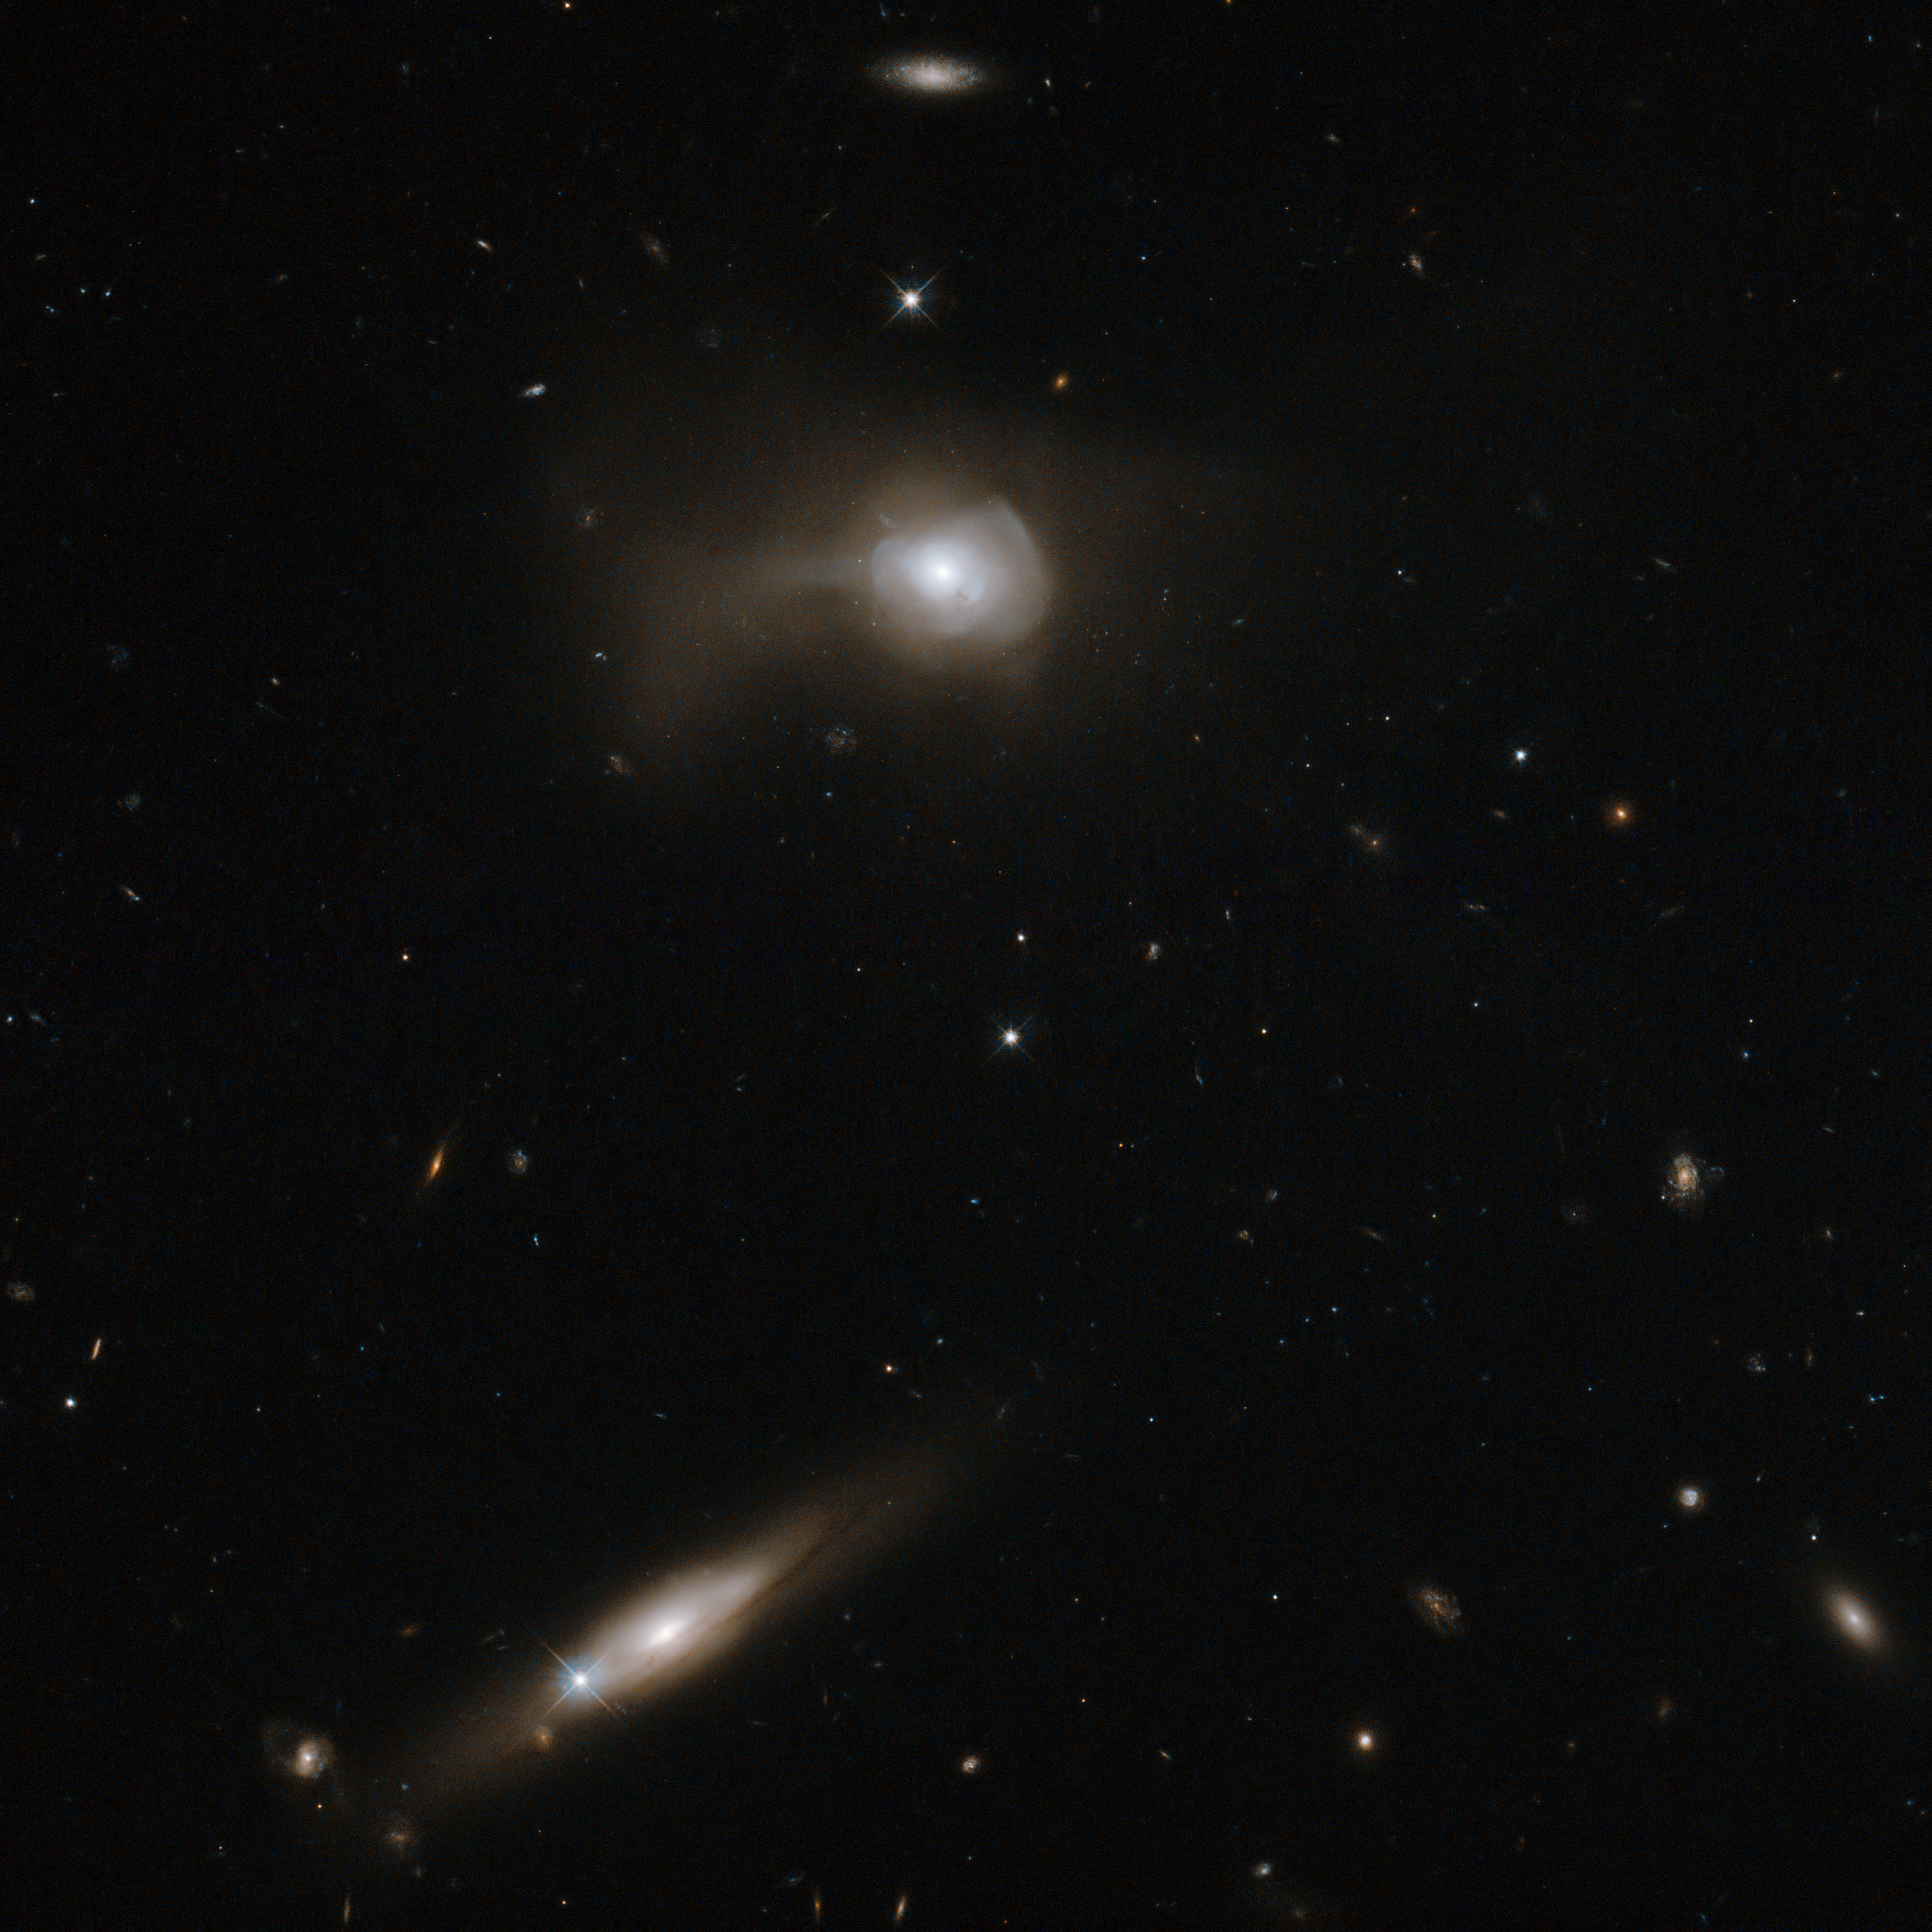

Transforming galaxies

Many of the Universe’s galaxies are like our own, displaying beautiful spiral arms wrapping around a bright nucleus. Examples in this stunning image, taken with the Wide Field Camera 3 on the NASA/ESA Hubble Space Telescope, include the tilted galaxy at the bottom of the frame, shining behind a Milky Way star, and the small spiral at the top centre.

Other galaxies are even odder in shape. Markarian 779, the galaxy at the top of this image, has a distorted appearance because it is likely the product of a recent galactic merger between two spirals. This collision destroyed the spiral arms of the galaxies and scattered much of their gas and dust, transforming them into a single peculiar galaxy with a unique shape.

This galaxy is part of the Markarian catalogue, a database of over 1500 galaxies named after B. E. Markarian, the Armenian astronomer who studied them in the 1960s. He surveyed the sky for bright objects with unusually strong emission in the ultraviolet.

Ultraviolet radiation can come from a range of sources, so the Markarian catalogue is quite diverse. An excess of ultraviolet emissions can be the result of the nucleus of an “active” galaxy, powered by a supermassive black hole at its centre. It can also be due to events of intense star formation, called starbursts, possibly triggered by galactic collisions. Markarian galaxies are, therefore, often the subject of studies aimed at understanding active galaxies, starburst activity, and galaxy interactions and mergers.

Credit: ESA/Hubble & NASA